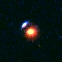

Hubble's Top Ten Gravitational Lenses. A View of HST 12368+6212

HST 12368+6212 is a blue arc in the Hubble Deep Field (HDF).

Credit: Kavan Ratnatunga (Carnegie Mellon Univ.) and NASA/ESA